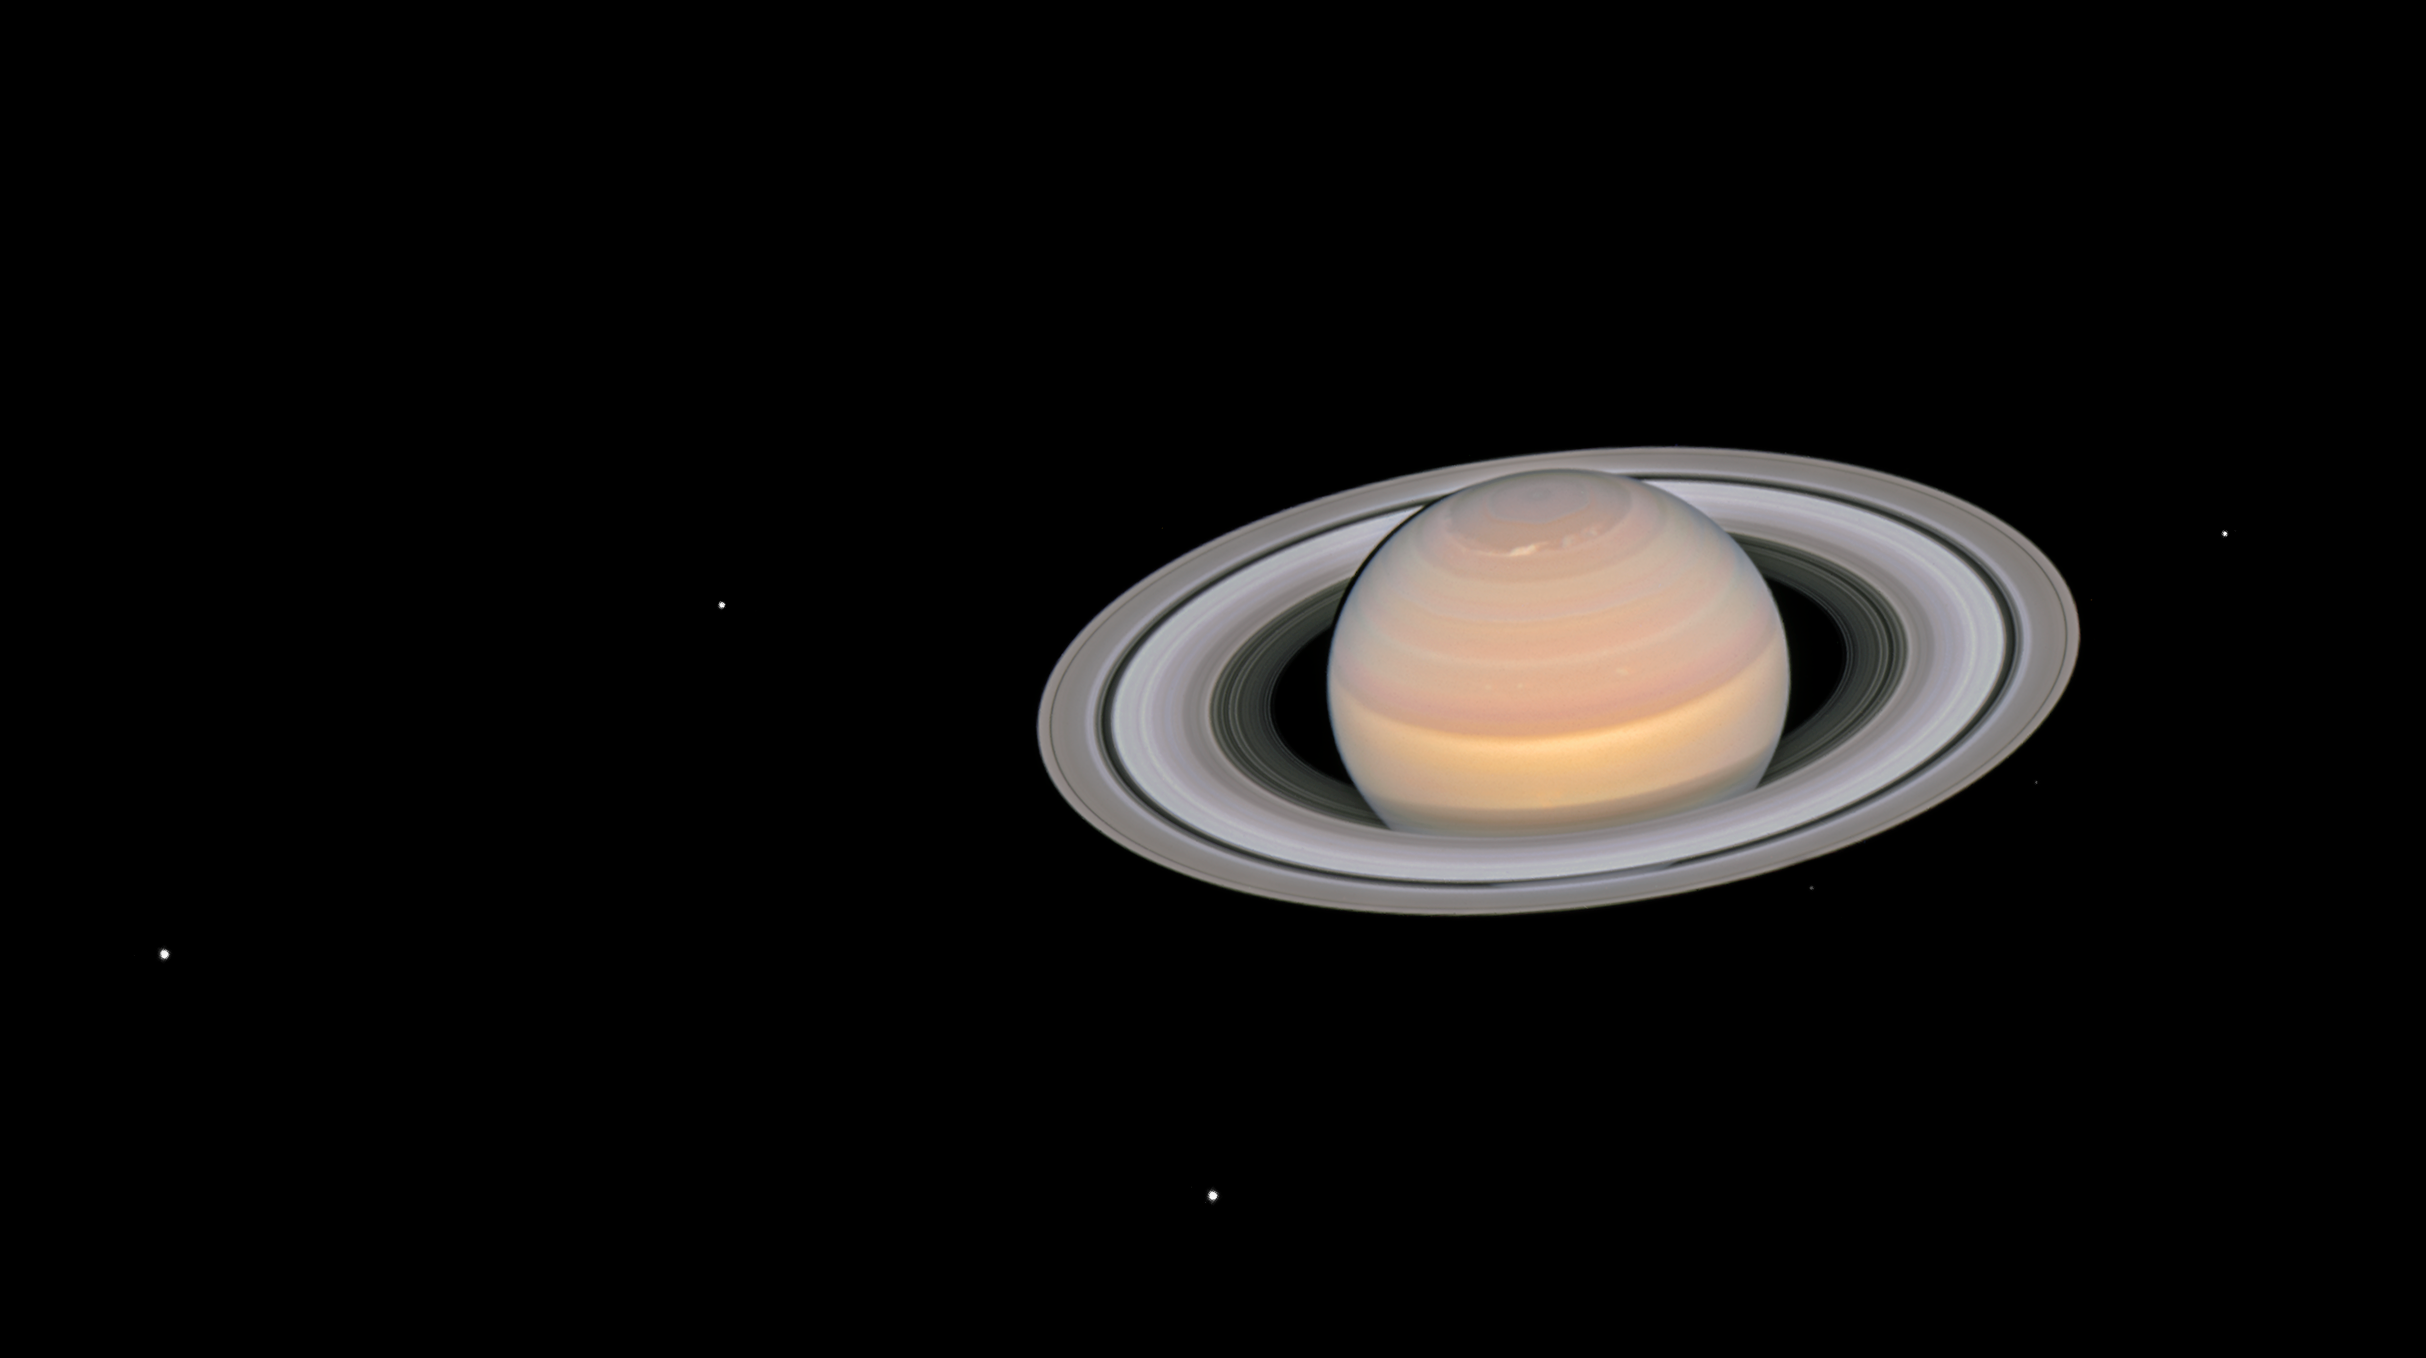

The moons of Saturn

This composite image, taken by the NASA/ESA Hubble Space Telescope on 6 June 2018, shows the ringed planet Saturn with six of its 62 known moons. From left to right, the moons visible in this image are Dione, Enceladus, Tethys, Janus, Epimetheus, and Mimas.

The moons seen here are all icy and cratered. Enceladus is considered a candidate for the existence of primitive life because it is outgassing water vapour from a subsurface ocean. Based on data from the Cassini mission to Saturn, scientists hypothesise that a small, wayward moon like one of these disintegrated 200 million years ago to form Saturn’s ring system.

The image is a composite because the moons move during the Saturn exposures, and individual frames must be realigned to make a colour portrait.

Credit: NASA, ESA, A. Simon (GSFC) and the OPAL Team, and J. DePasquale (STScI)